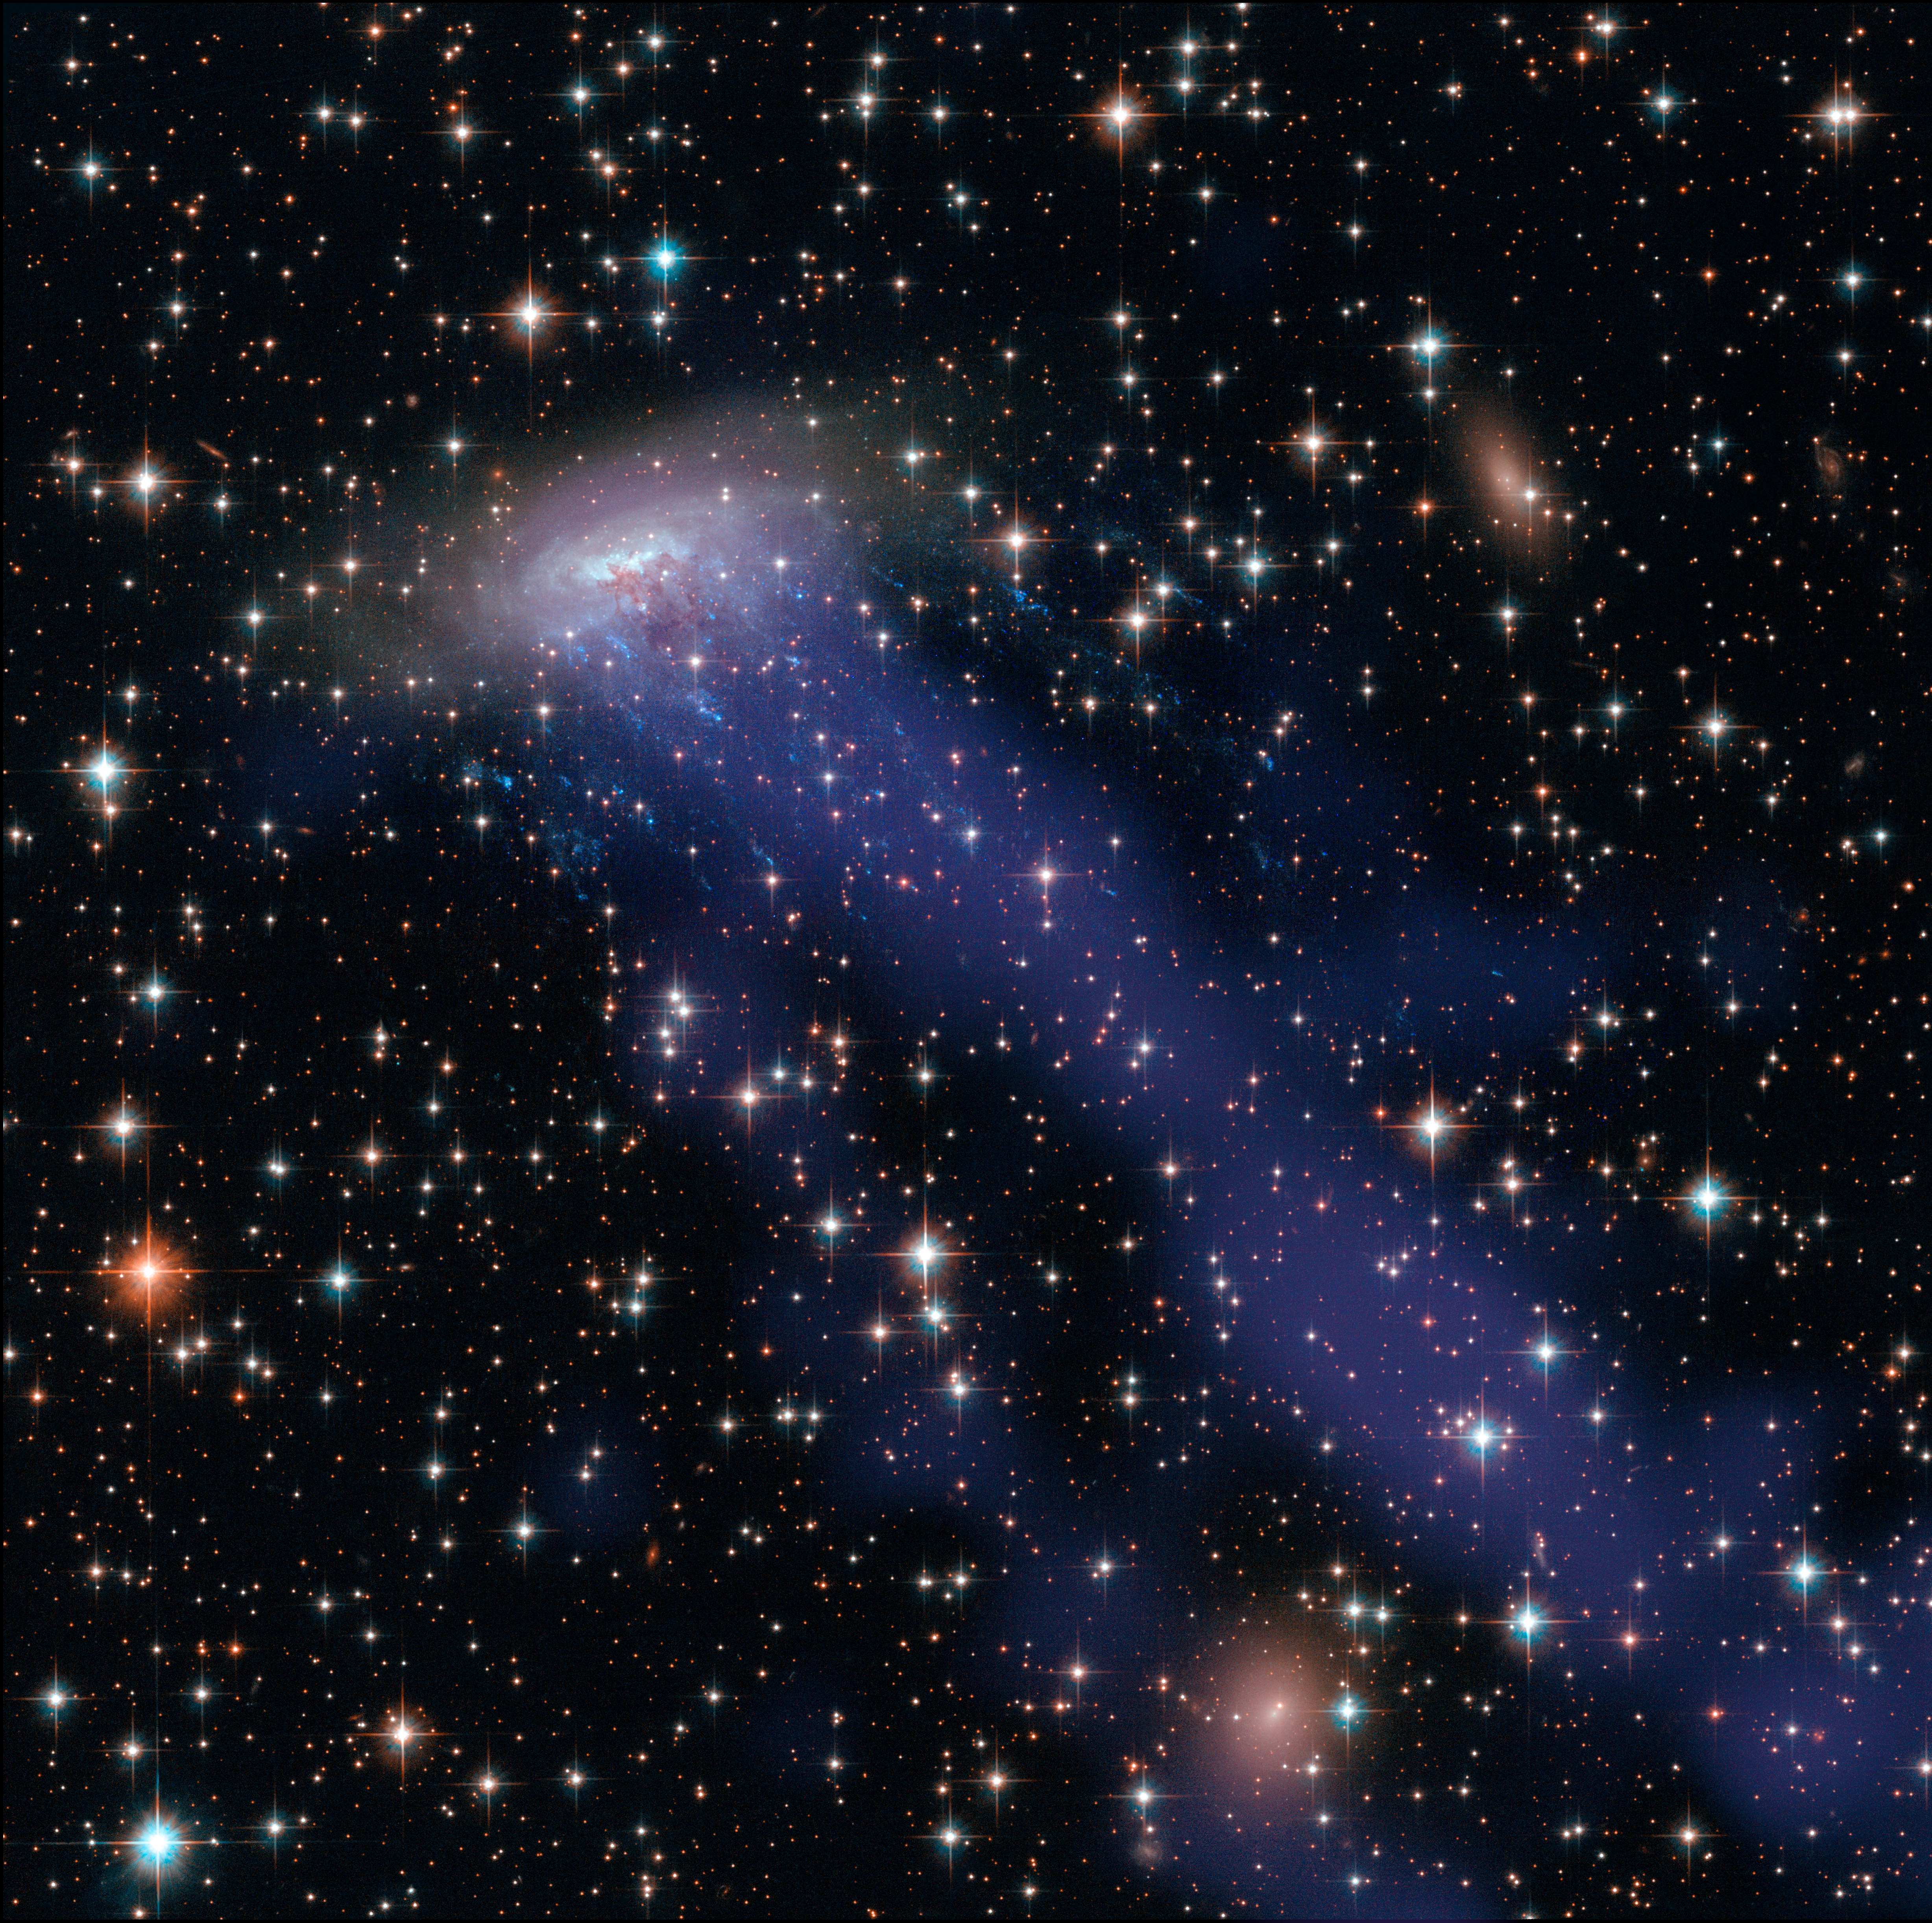

Hubble and Chandra composite of ESO 137-001

This image combines NASA/ESA Hubble Space Telescope observations with data from the Chandra X-ray Observatory. As well as the electric blue ram pressure stripping streaks seen emanating from ESO 137-001, a giant gas stream can be seen extending towards the bottom of the frame, only visible in the X-ray part of the spectrum.

Credit: NASA, ESA, CXC